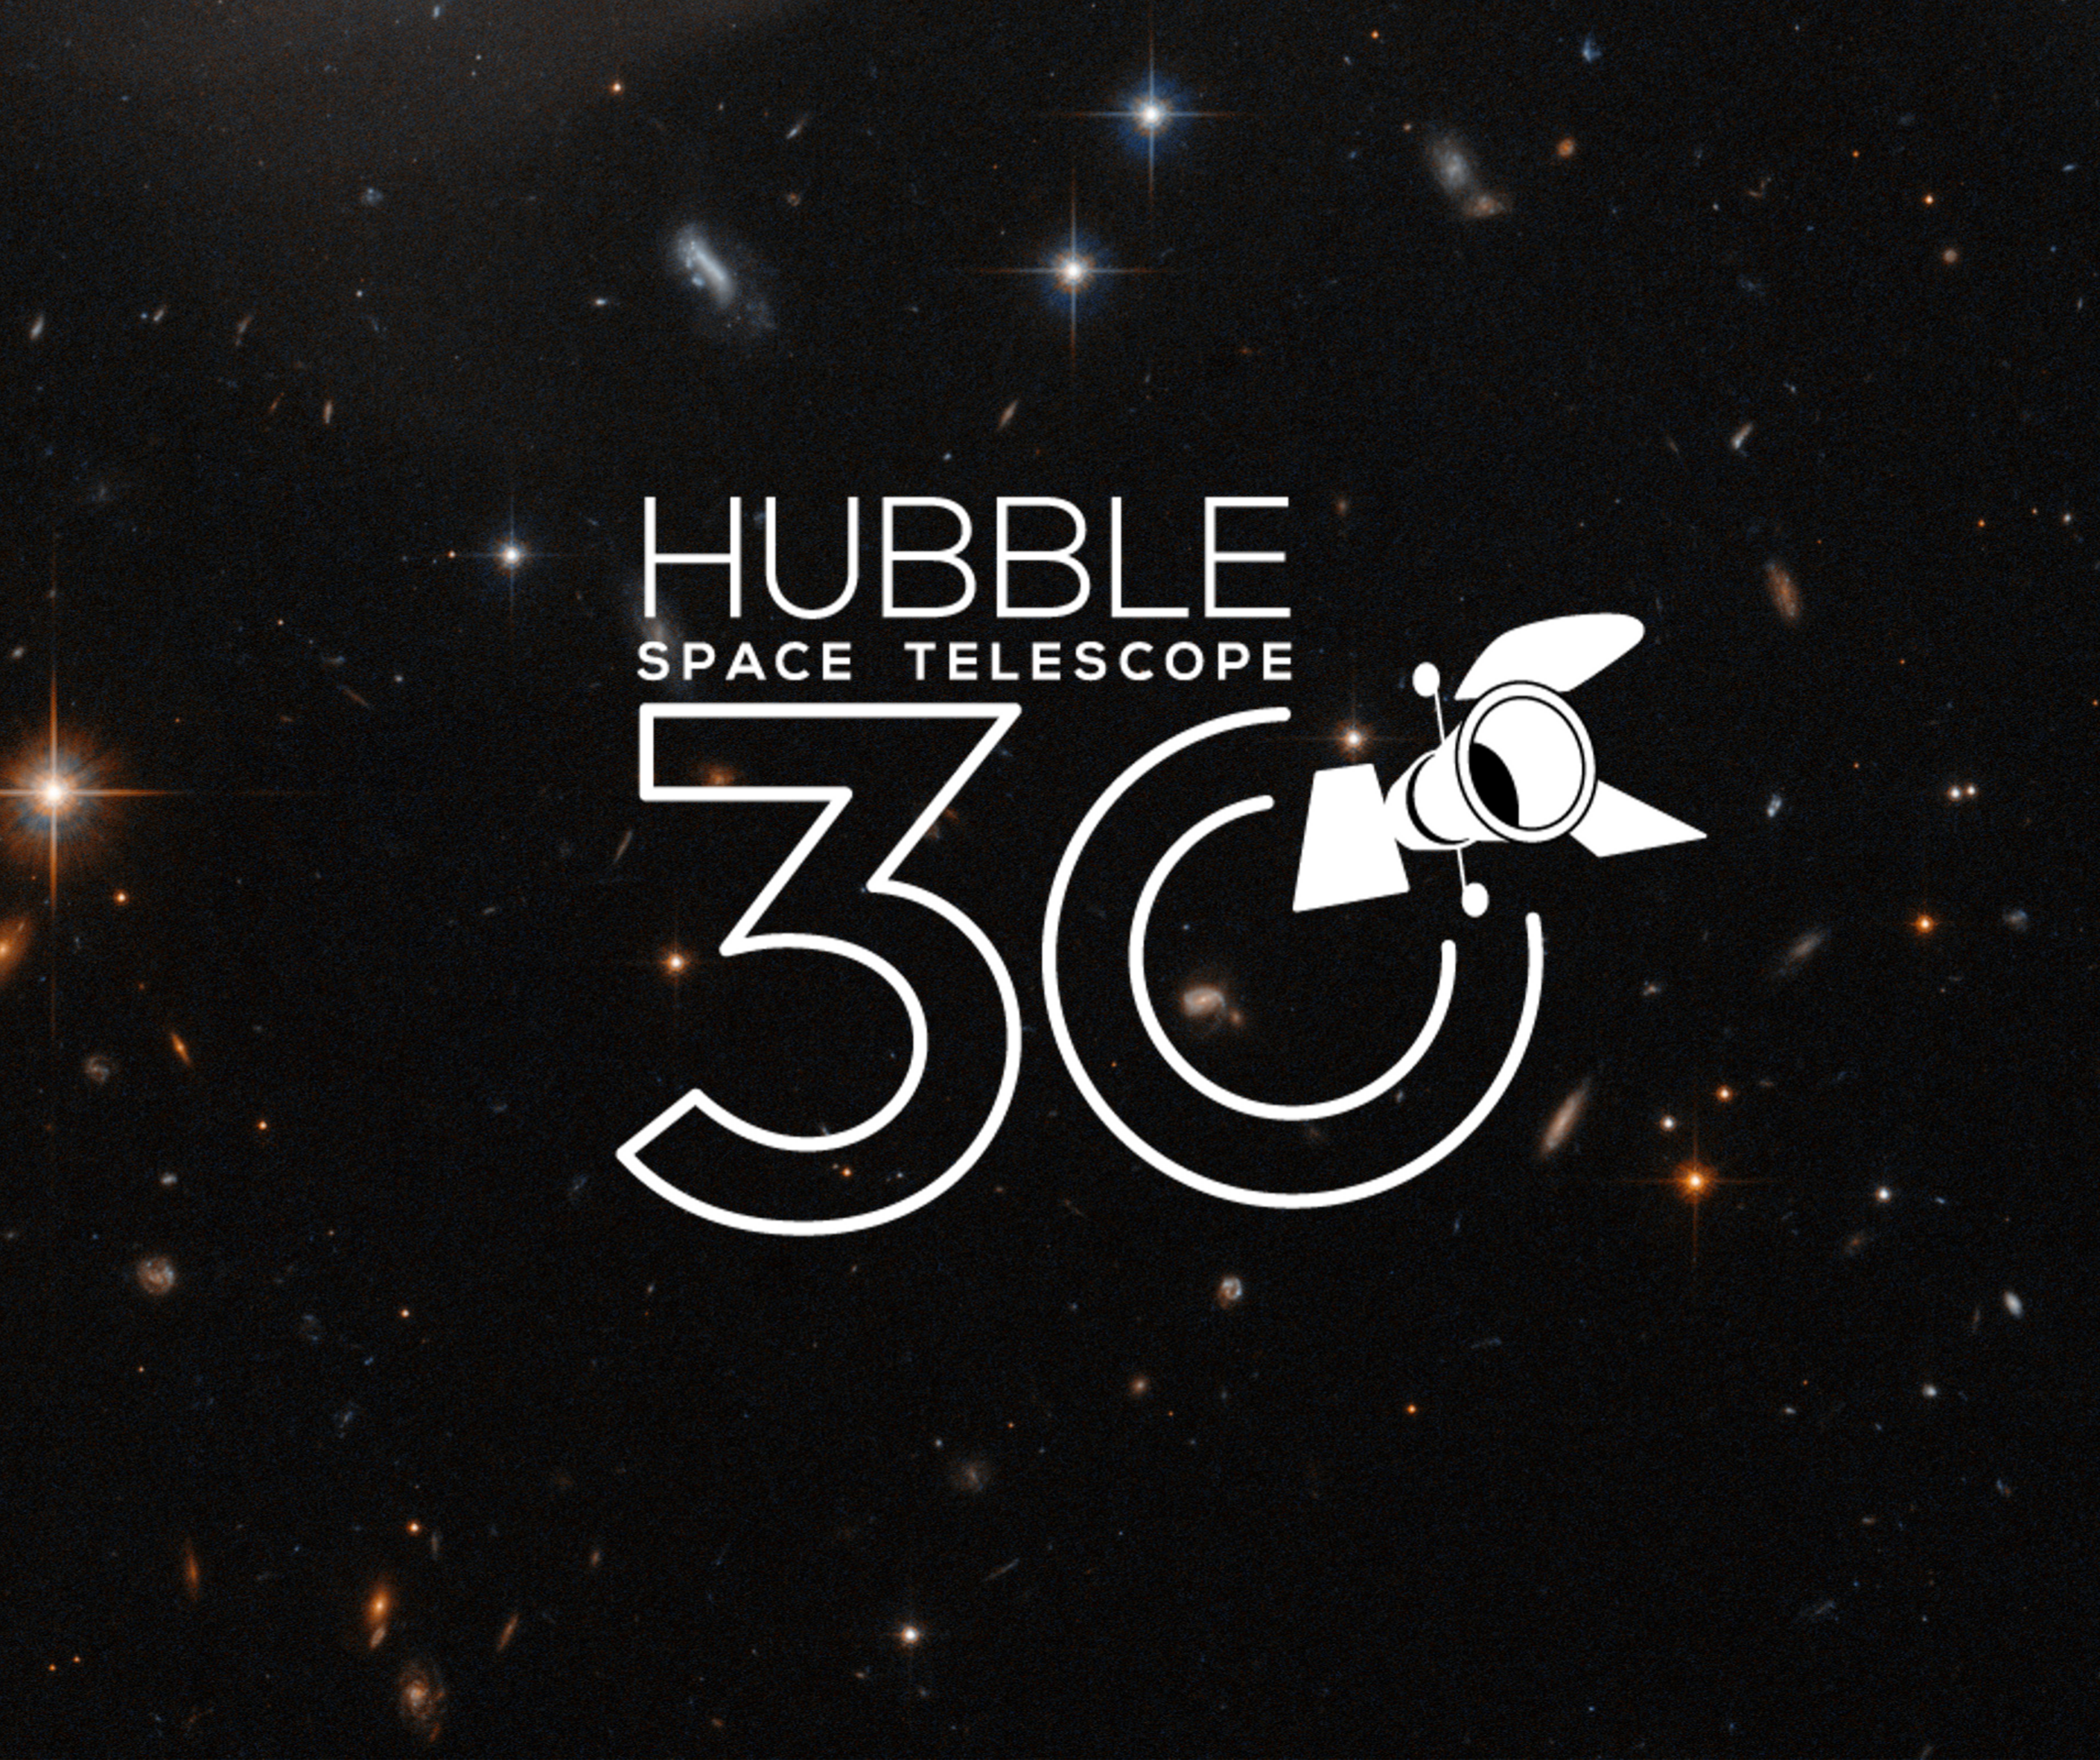

Hubble 30 Image Unveiling Solicitation Call

Hubble 30 Image Unveiling Solicitation Call.

Credit: ESA/Hubble